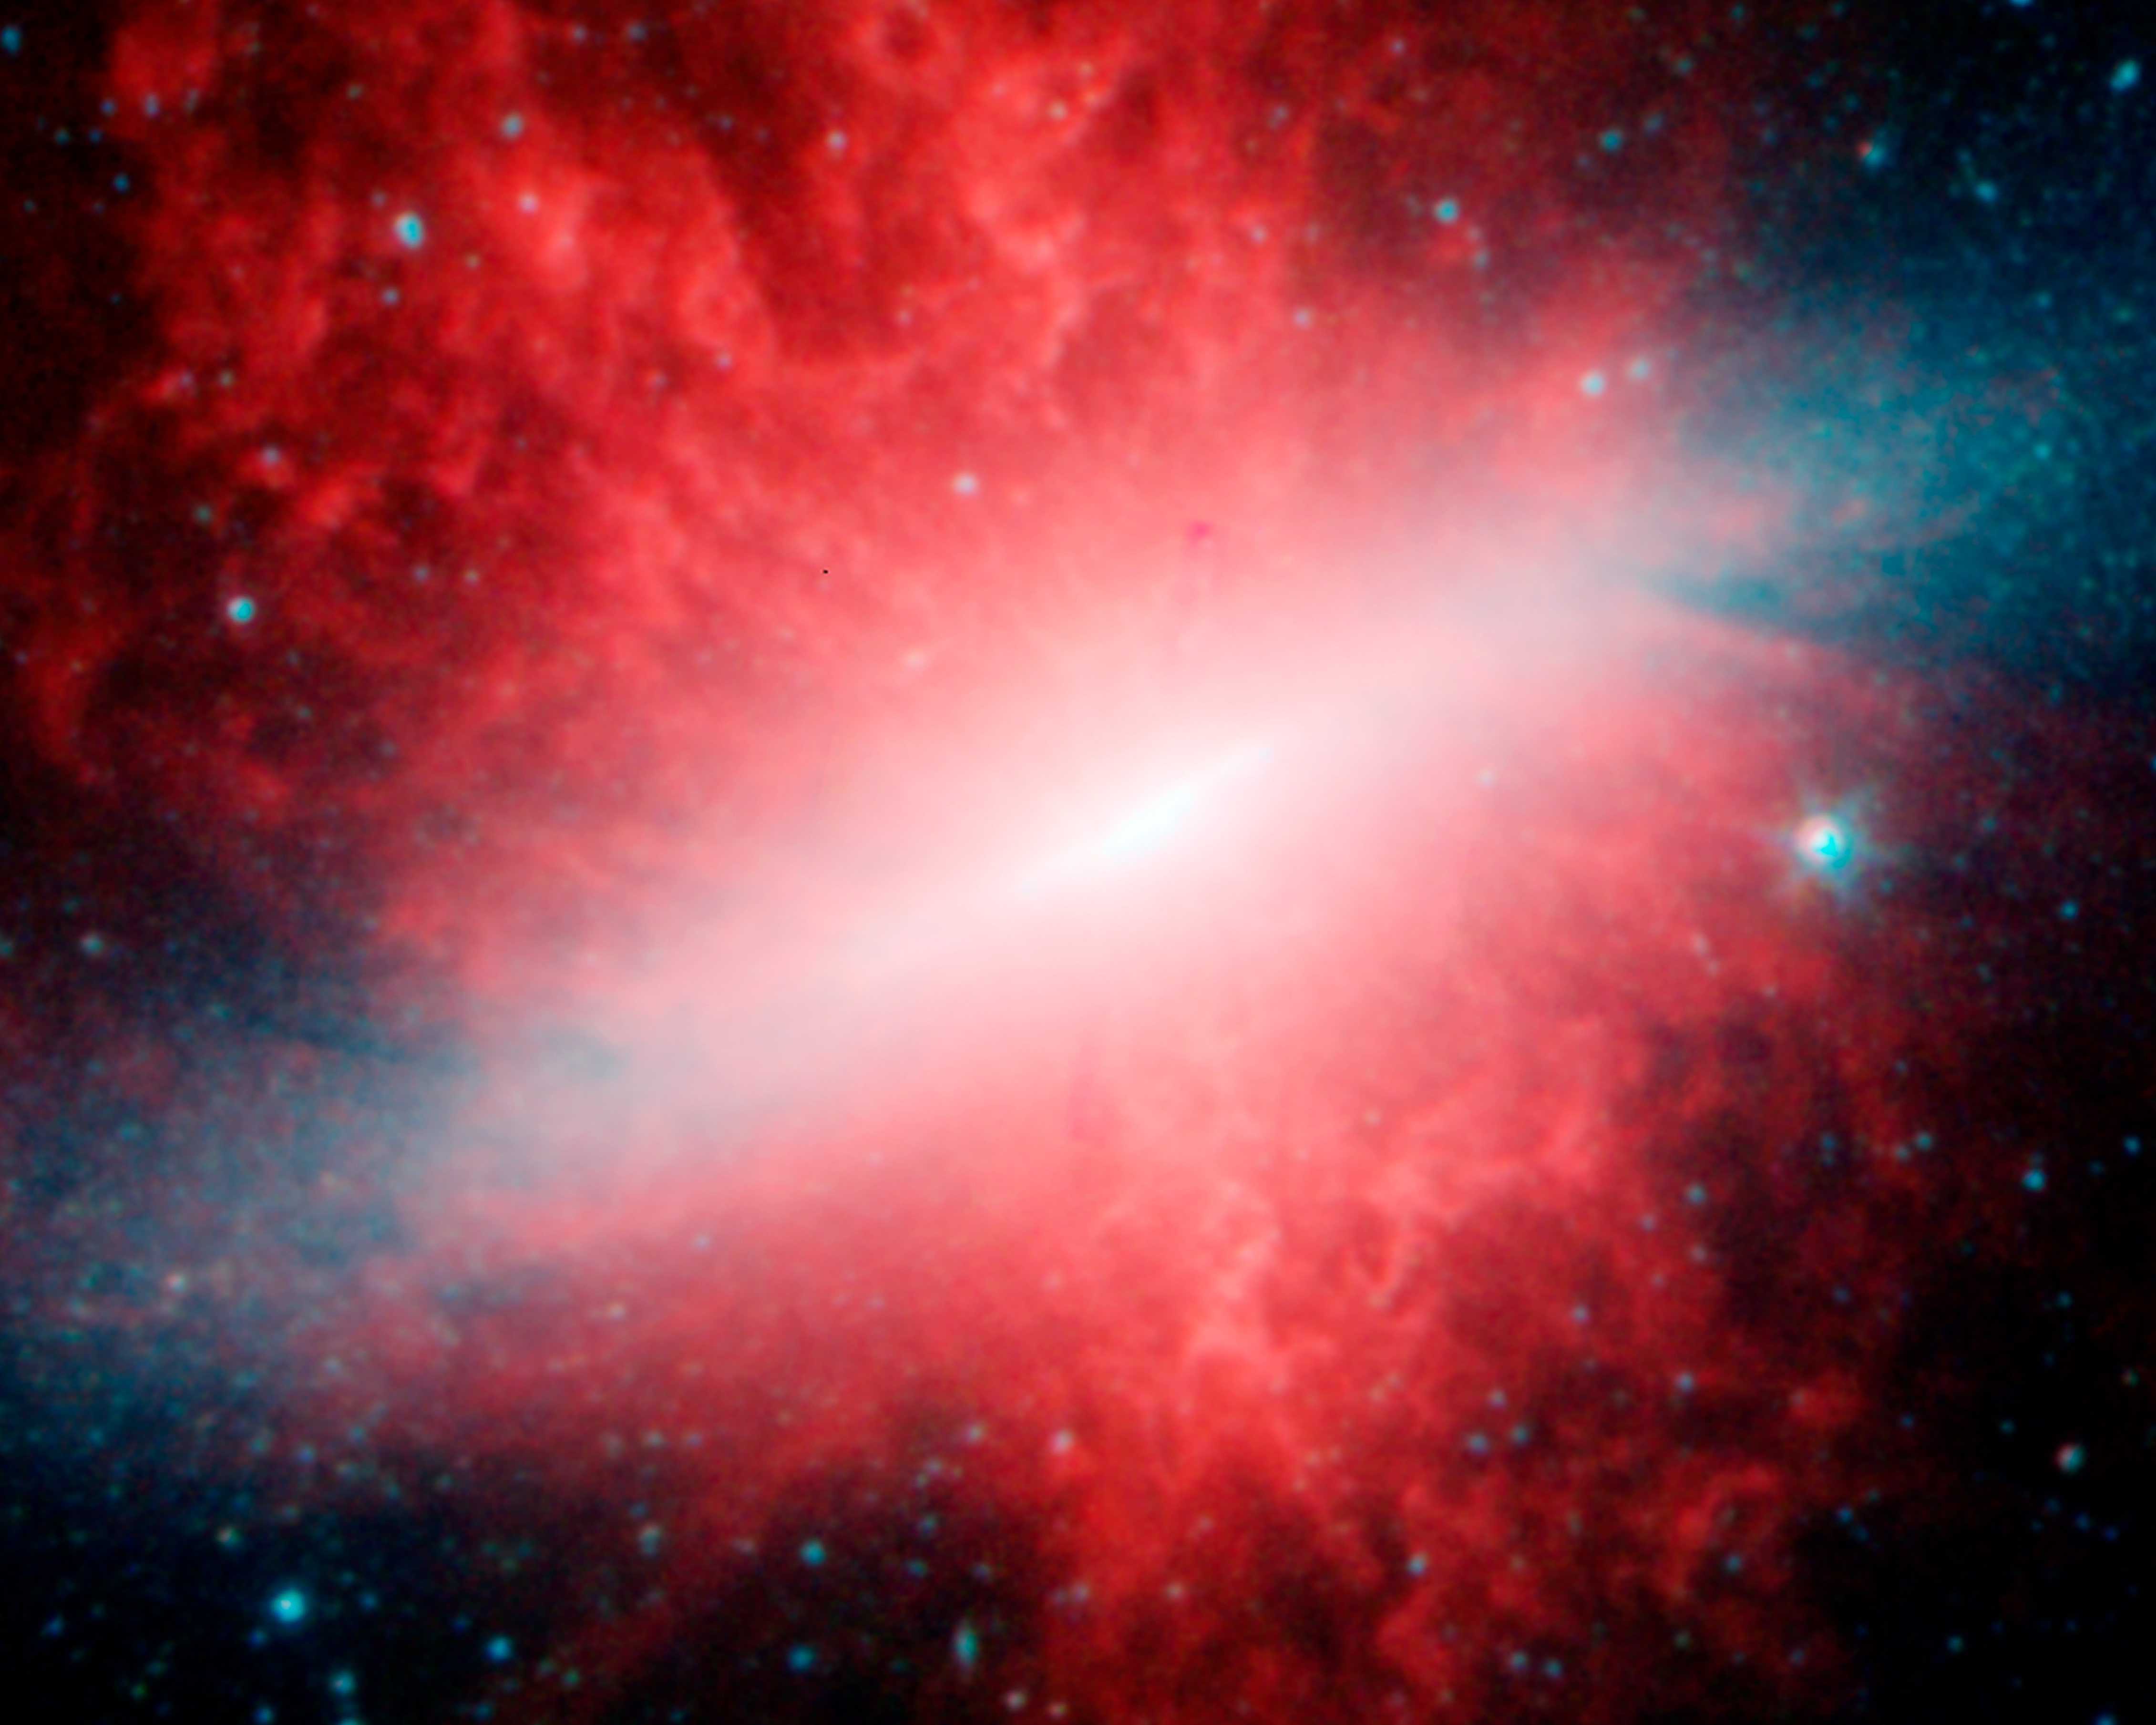

Spitzer image of Messier 82

Composite image of the active galaxy Messier 82 from infrared observations by Spitzer Space Telescope in three wavelength bands coded in red (longest wavelength), green, and blue (shortest wavelengths).

Credit: NASA/JPL-Caltech/C. Engelbracht (University of Arizona)